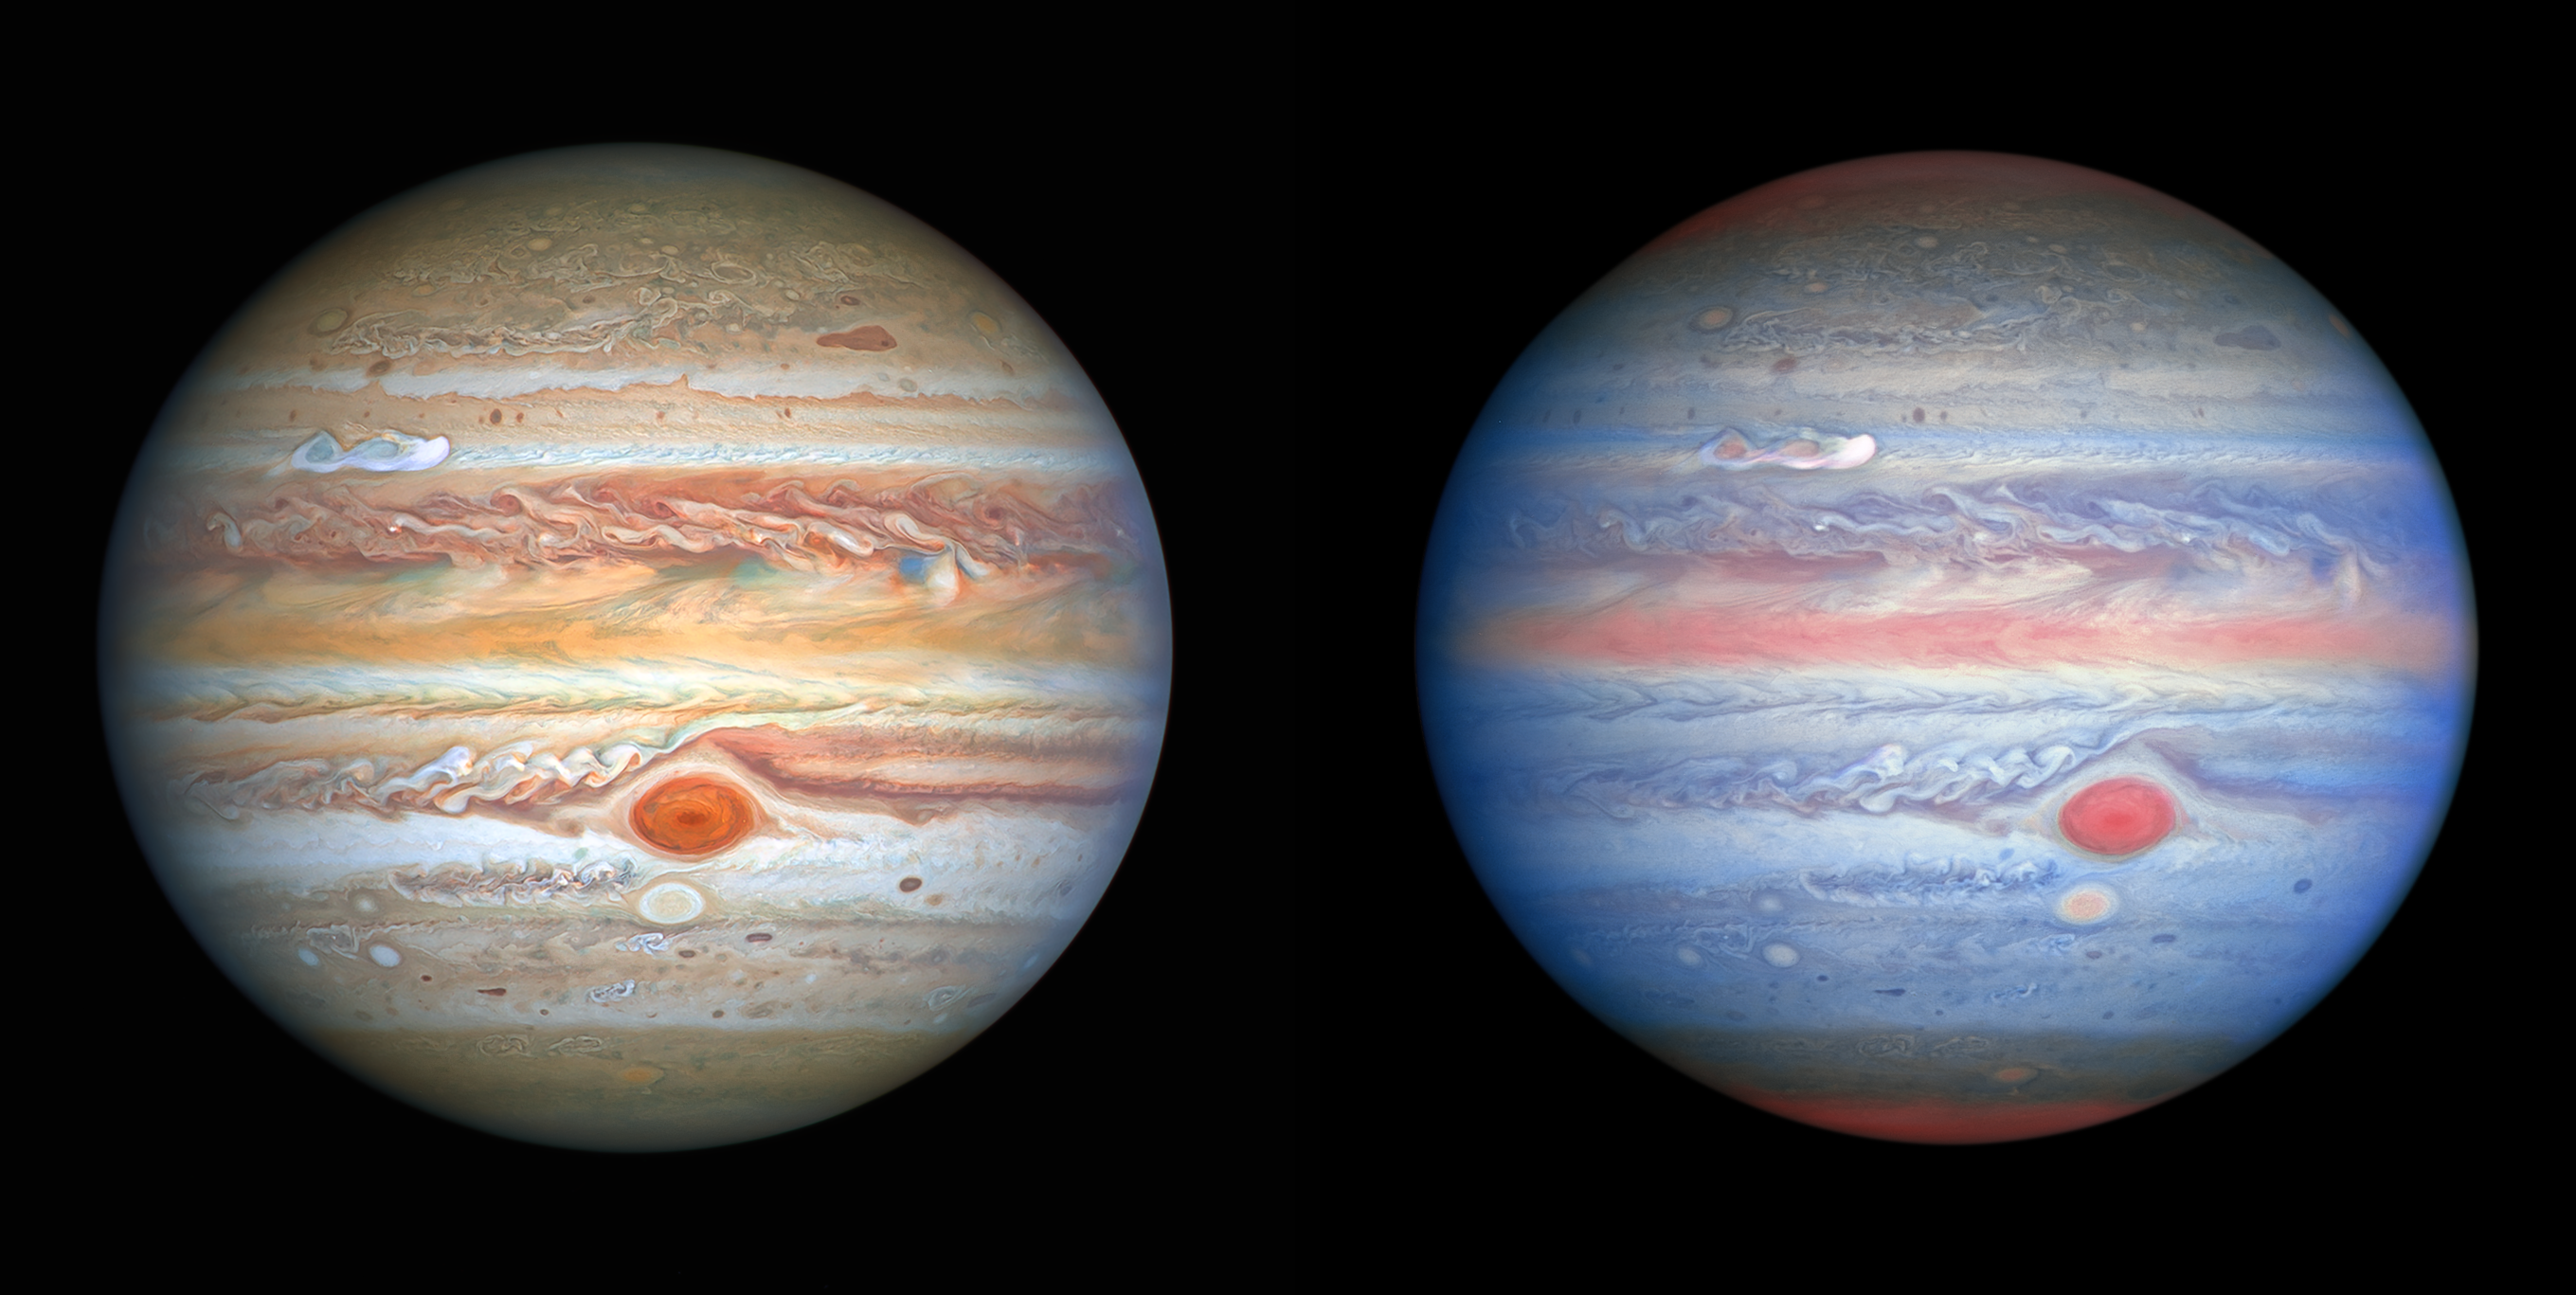

Hubble’s New Views of Jupiter

[Left] This latest visible-light image of Jupiter was taken by the Hubble Space Telescope on 25 August 2020 and was captured when the planet was 653 million kilometres from Earth. Hubble’s sharp view is giving researchers an updated weather report on the monster planet’s turbulent atmosphere, including a remarkable new storm brewing, and a cousin of the Great Red Spot changing colour — again. The new image also features Jupiter’s icy moon Europa.

[Right] This multiwavelength observation in ultraviolet/visible/near-infrared light of Jupiter was obtained by the Hubble Space Telescope on 25 August 2020 and is giving researchers an entirely new view of the giant planet. Hubble’s near-infrared imaging, combined with ultraviolet views, provides a unique panchromatic look that offers insights into the altitude and distribution of the planet’s haze and particles. This complements Hubble’s visible-light pictures that show the ever-changing cloud patterns.

Credit: NASA, ESA, A. Simon (Goddard Space Flight Center), and M. H. Wong (University of California, Berkeley) and the OPAL team.